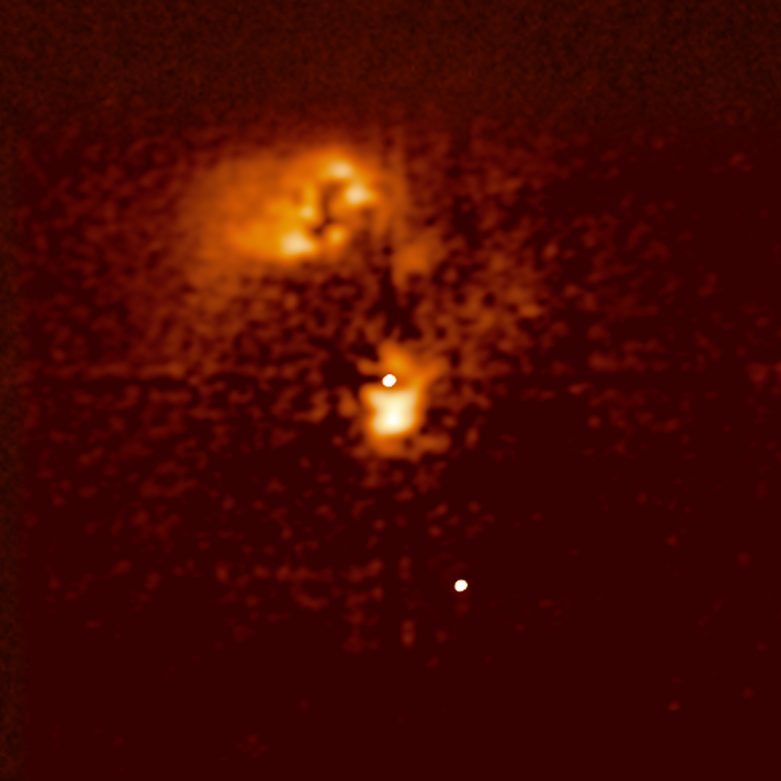

Looking "underneath" the quasar HE0450-2958

This image shows the quasar HE0450-2958 after advanced image processing known as MCS-deconvolution. Thanks to this technique, it is possible to remove the brilliant glare from the quasar itself.

The most interesting feature in the image is the nearly total absence of starlight from a host galaxy. The processing also reveal an interesting smaller cloud of gas about 2,500 light-years wide, which the scientist call "the blob", just next to the quasar. VLT observations show this cloud to be glowing because it is bathed in the intense radiation coming from the quasar. Most likely, it is the gas from this "blob" that feeds the super massive black hole, thereby allowing it to shine as a quasar.

Credit: NASA/ESA, ESO, Frédéric Courbin (Ecole Polytechnique Federale de Lausanne, Switzerland) & Pierre Magain (Universite de Liège, Belgium)